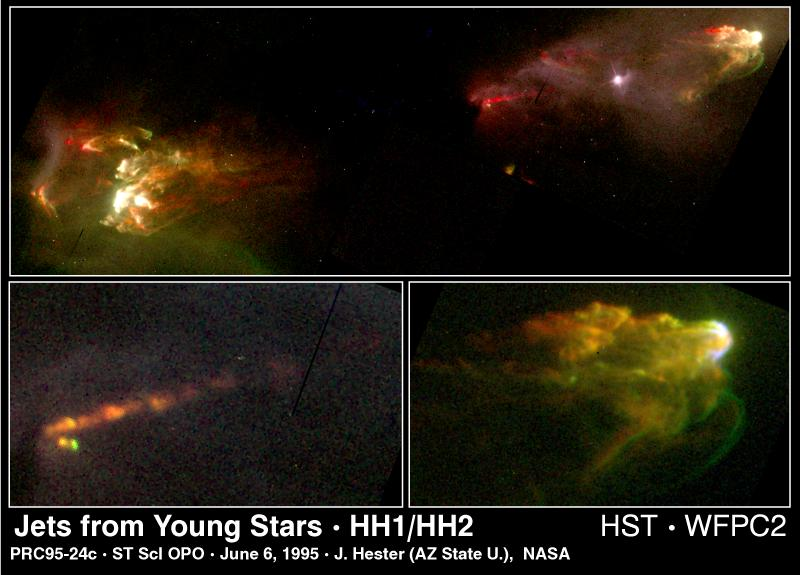

Jets from Young Star

This Hubble Space Telescope image reveals new secrets of star birth as revealed in a pair of eerie spectacular jet of gas the star has ejected by a young star.

Top Image

Tip to tip, this jet spans slightly more than a light-year. The fountainhead of this structure -- the young star -- lies midway between the jet, and is hidden from view behind a dark cloud of dust. The nearly symmetrical blobs of gas at either end are where the jet has slammed into interstellar gas.

Bottom Left Image

A close-up of a region near the star reveals a string of glowing clumps of gas, ejected by the star in machine-gun like burst fashion. This provides new clues to the dynamics of the star formation process. The jets are ejected from a whirlpool of gas and dust orbiting the young star.

Bottom Right Image

This arrowhead structure is a classic bowshock pattern produced when high-speed material encounters a slower-speed medium. Young stellar jets were discovered 20 years ago, in part due to visible-light observations of bright patches of nebulosity (called Herbig-Haro objects), which appear to be moving away from associated protostars.

Credit: J. Hester (Arizona State University), the WFPC 2 Investigation Definition Team, and NASA/ESA